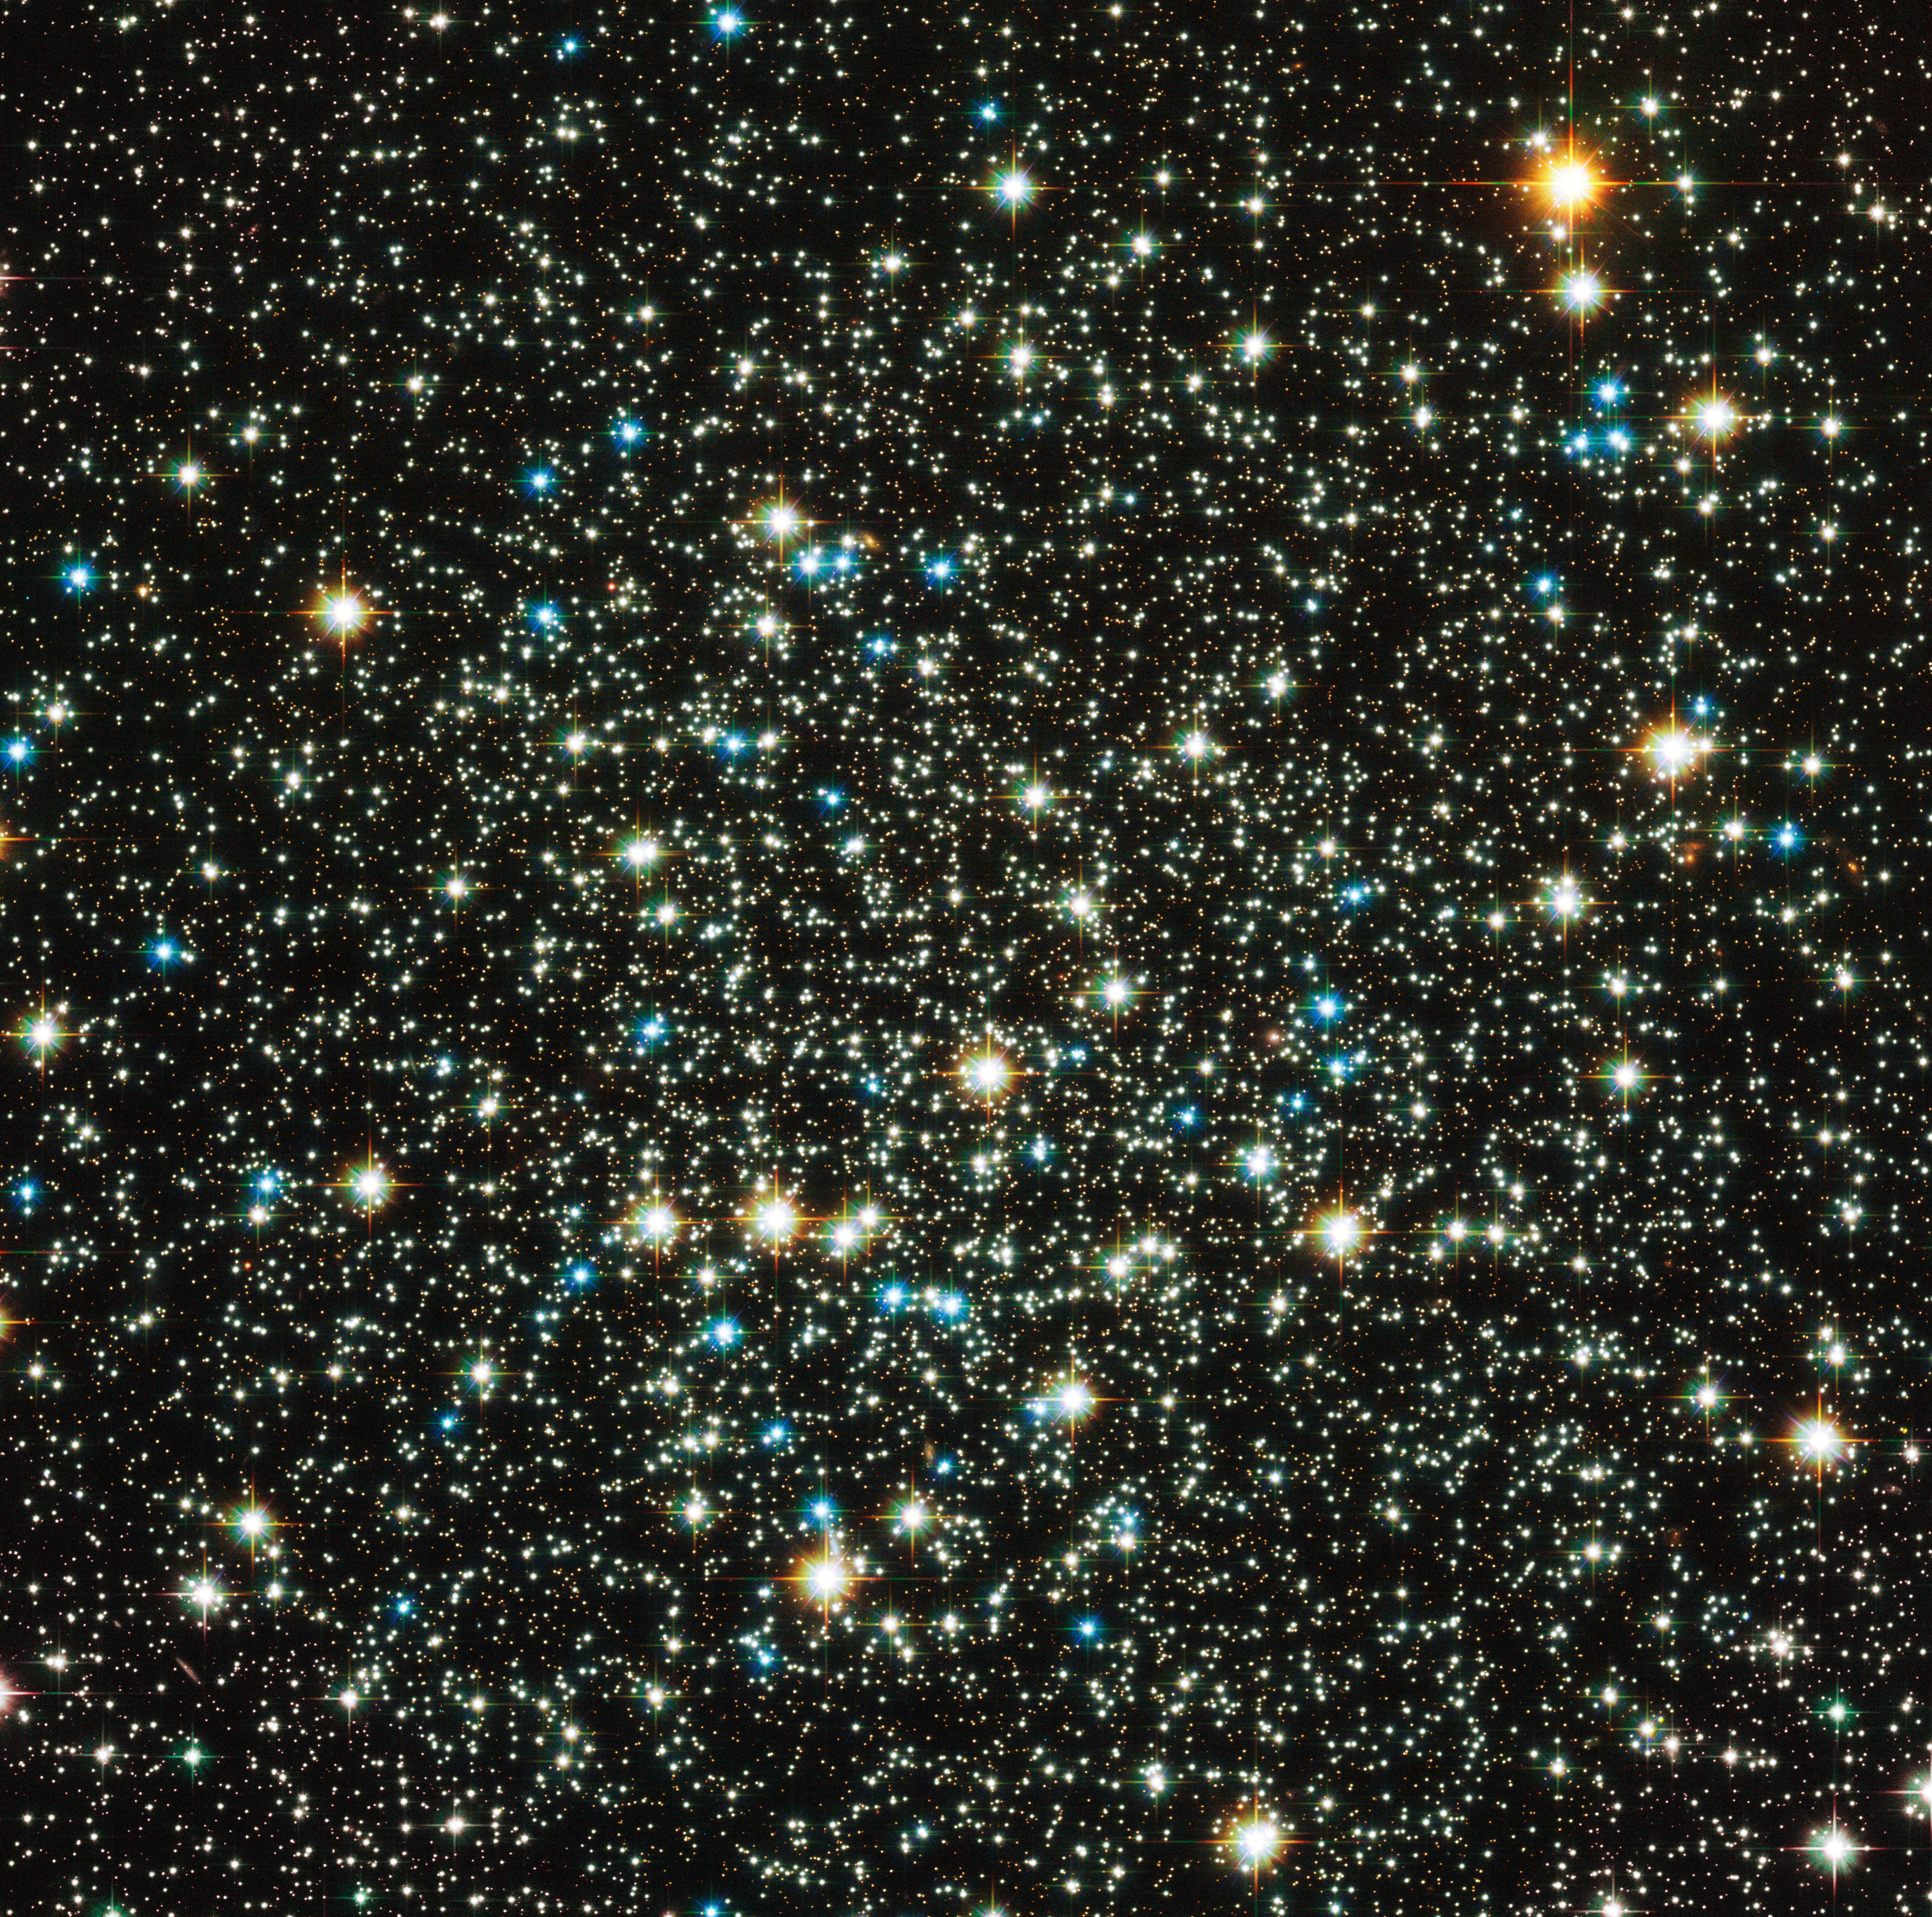

Family of stars breaking up

Most of the rich globular star clusters that orbit the Milky Way have cores that are tightly packed with stars, but NGC 288 is one of a minority of low-concentration globulars, with its stars more loosely bound together. This new image from the Advanced Camera for Surveys on the NASA/ESA Hubble Space Telescope completely resolves the old stars at the core of the cluster.

The colours and brightnesses of the stars in the picture tell the story of how the stars have evolved in the cluster. The many fainter points of light are normal low-mass stars that are still fusing hydrogen in the same way as the Sun. The brighter stars fall into two classes: the yellow ones are red giant stars that are at a later phase in their careers and are now bigger, cooler and brighter. The bright blue stars are even more massive stars that have left the red giant phase and are being powered by helium fusion in their cores.

The stars within globular clusters form at about the same time from the same cloud of gas, making these close families of stars. However, astronomers think that the stellar siblings in low-concentration globular clusters such as NGC 288, which are not so tightly bound together by gravity as richer and denser clusters, may eventually disperse and go their separate ways.

NGC 288 is found within the rather obscure southern constellation of Sculptor, at a distance of about 30 000 light-years. This constellation also contains NGC 253, more commonly called the Sculptor Galaxy due to its location, and these two deep sky objects are close enough together on the sky to be observed in the same binocular field of view. William Herschel first spotted NGC 288 in 1785 and also recognised that it was a globular cluster that could be resolved into stars in his telescope.

This picture was created from Hubble images taken using the Wide Field Channel of the Advanced Camera for Surveys through four different filters. Light recorded through a blue filter (F435W) is coloured blue, light through an orange filter (F606W) appears as green, light coming through a near-infrared filter (F814W) is red and finally the light from glowing hydrogen (F658N) is orange. The exposure times were 740 s, 530 s, 610 s and 1760 s respectively and the field of view is 3.2 arcminutes across.

Credit: ESA/Hubble & NASA